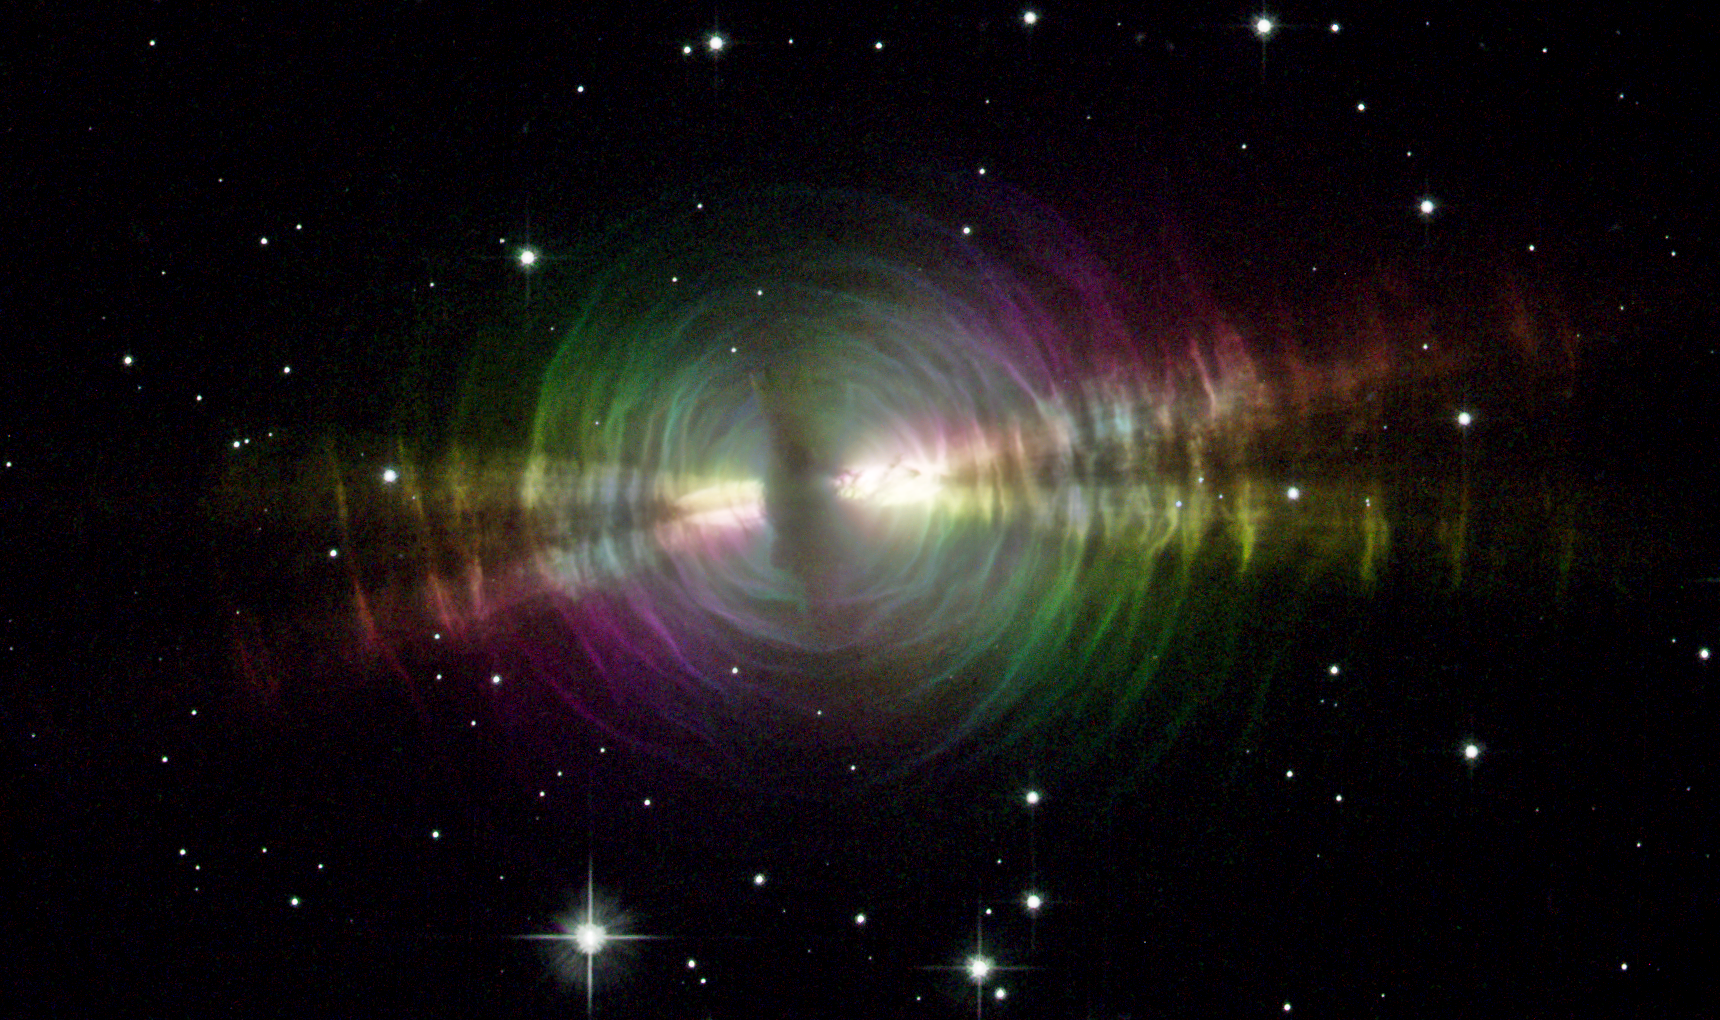

Rainbow image of a dusty star

Resembling a rippling pool illuminated by underwater lights, the Egg Nebula offers astronomers a special look at the normally invisible dust shells swaddling an aging star. These dust layers, extending over one-tenth of a light-year from the star, have an onionskin structure that forms concentric rings around the star. A thicker dust belt, running almost vertically through the image, blocks off light from the central star. Twin beams of light radiate from the hidden star and illuminate the pitch-black dust, like a shining flashlight in a smoky room.

The Egg Nebula is located 3, 000 light-years away in the constellation Cygnus. This image was taken with Hubble's Advanced Camera for Surveys in September and October 2002.

Credit: NASA/ESA and The Hubble Heritage Team STScI/AURA)